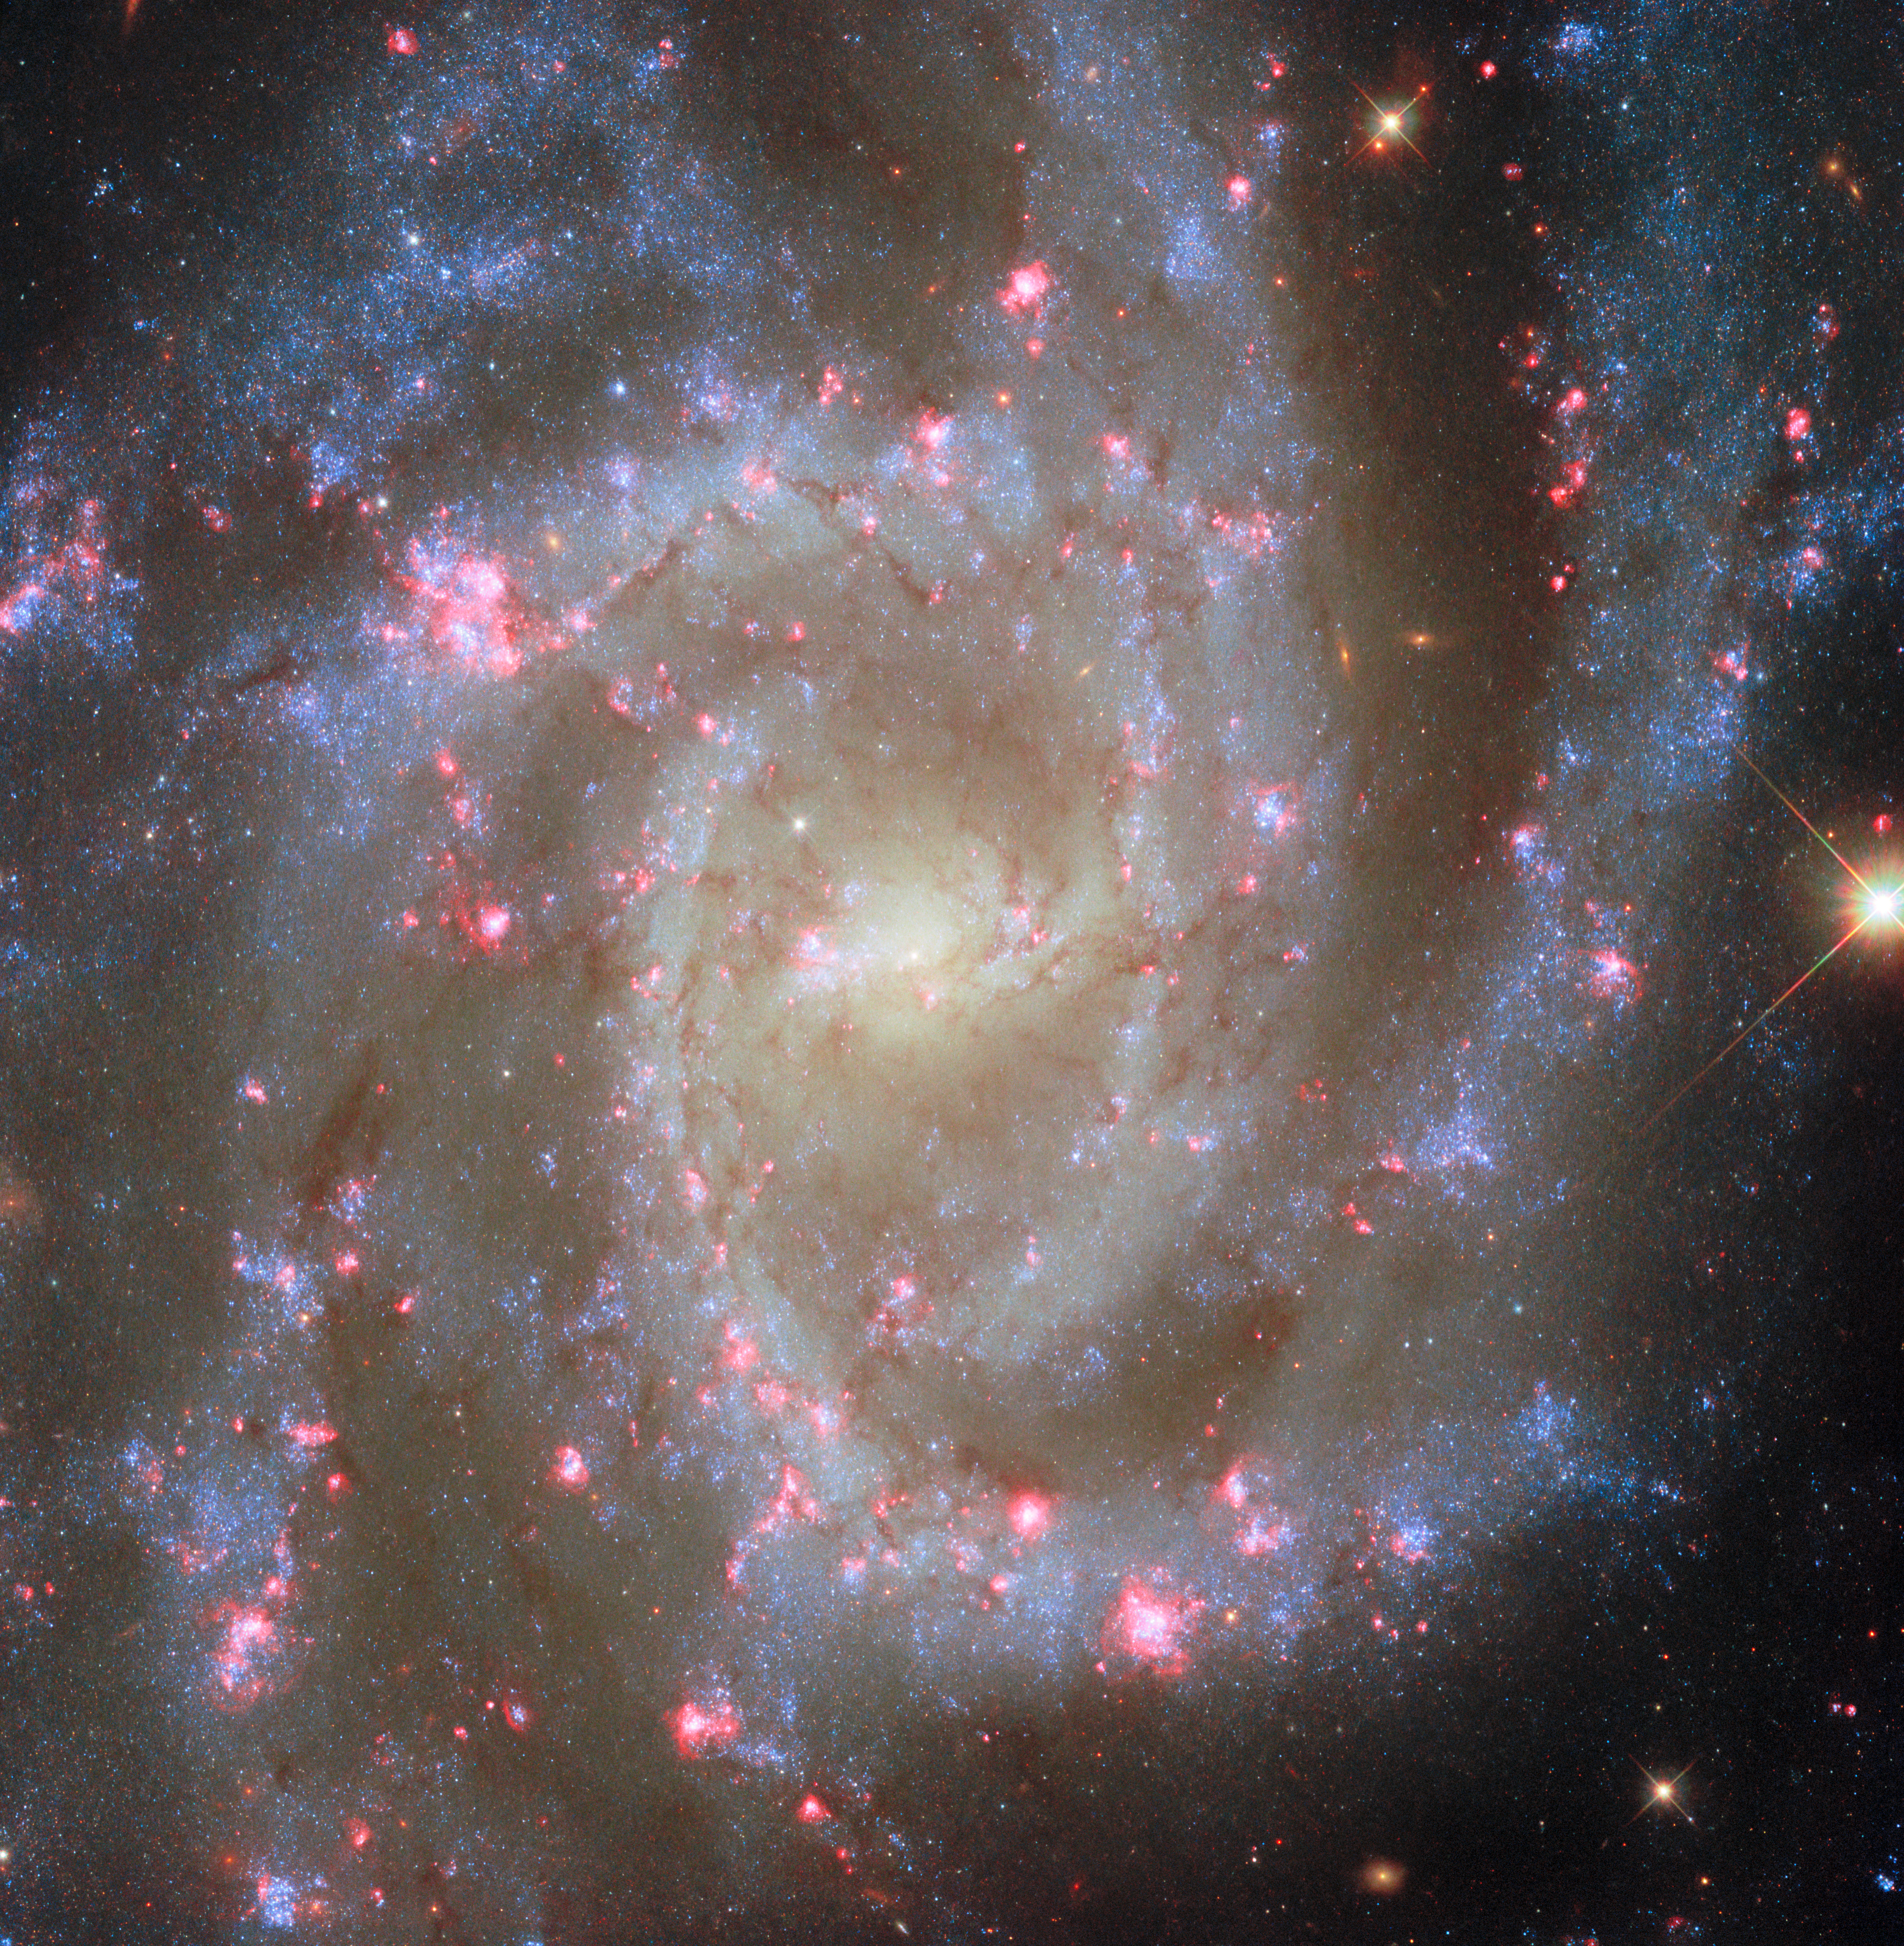

Noteworthy nearby spiral

Today’s NASA/ESA Hubble Space Telescope Picture of the Week offers a closeup of a nearby spiral galaxy. The subject is NGC 2835, which lies 35 million light-years away in the constellation Hydra (The Water Snake).

A previous Hubble image of this galaxy was released in 2020, and the NASA/ESA/CSA James Webb Space Telescope turned its gaze toward NGC 2835 in recent years as well. Do you see anything different between today’s image of NGC 2835 and the previously released versions? Overall, NGC 2835 looks quite similar in all of these images, with spiral arms dotted with young blue stars sweeping around an oval-shaped centre, where older stars reside.

This image differs from previously released images because it incorporates new data from Hubble that captures a specific wavelength of red light called H-alpha. The regions that are bright in H-alpha emission can be seen along NGC 2835’s spiral arms, where dozens of bright pink nebulae appear like flowers in bloom. Astronomers are interested in H-alpha light because it signals the presence of several different types of nebulae that arise during different stages of a star’s life. Newborn massive stars create nebulae called H II regions that are particularly brilliant sources of H-alpha light, while dying stars can leave behind supernova remnants or planetary nebulae that can also be identified by their H-alpha emission.

By using Hubble’s sensitive instruments to survey 19 nearby galaxies, researchers aim to identify more than 50 000 nebulae. These observations will help to explain how stars affect their birth neighbourhoods through intense starlight and winds.

Credit: ESA/Hubble & NASA, R. Chandar, J. Lee and the PHANGS-HST team